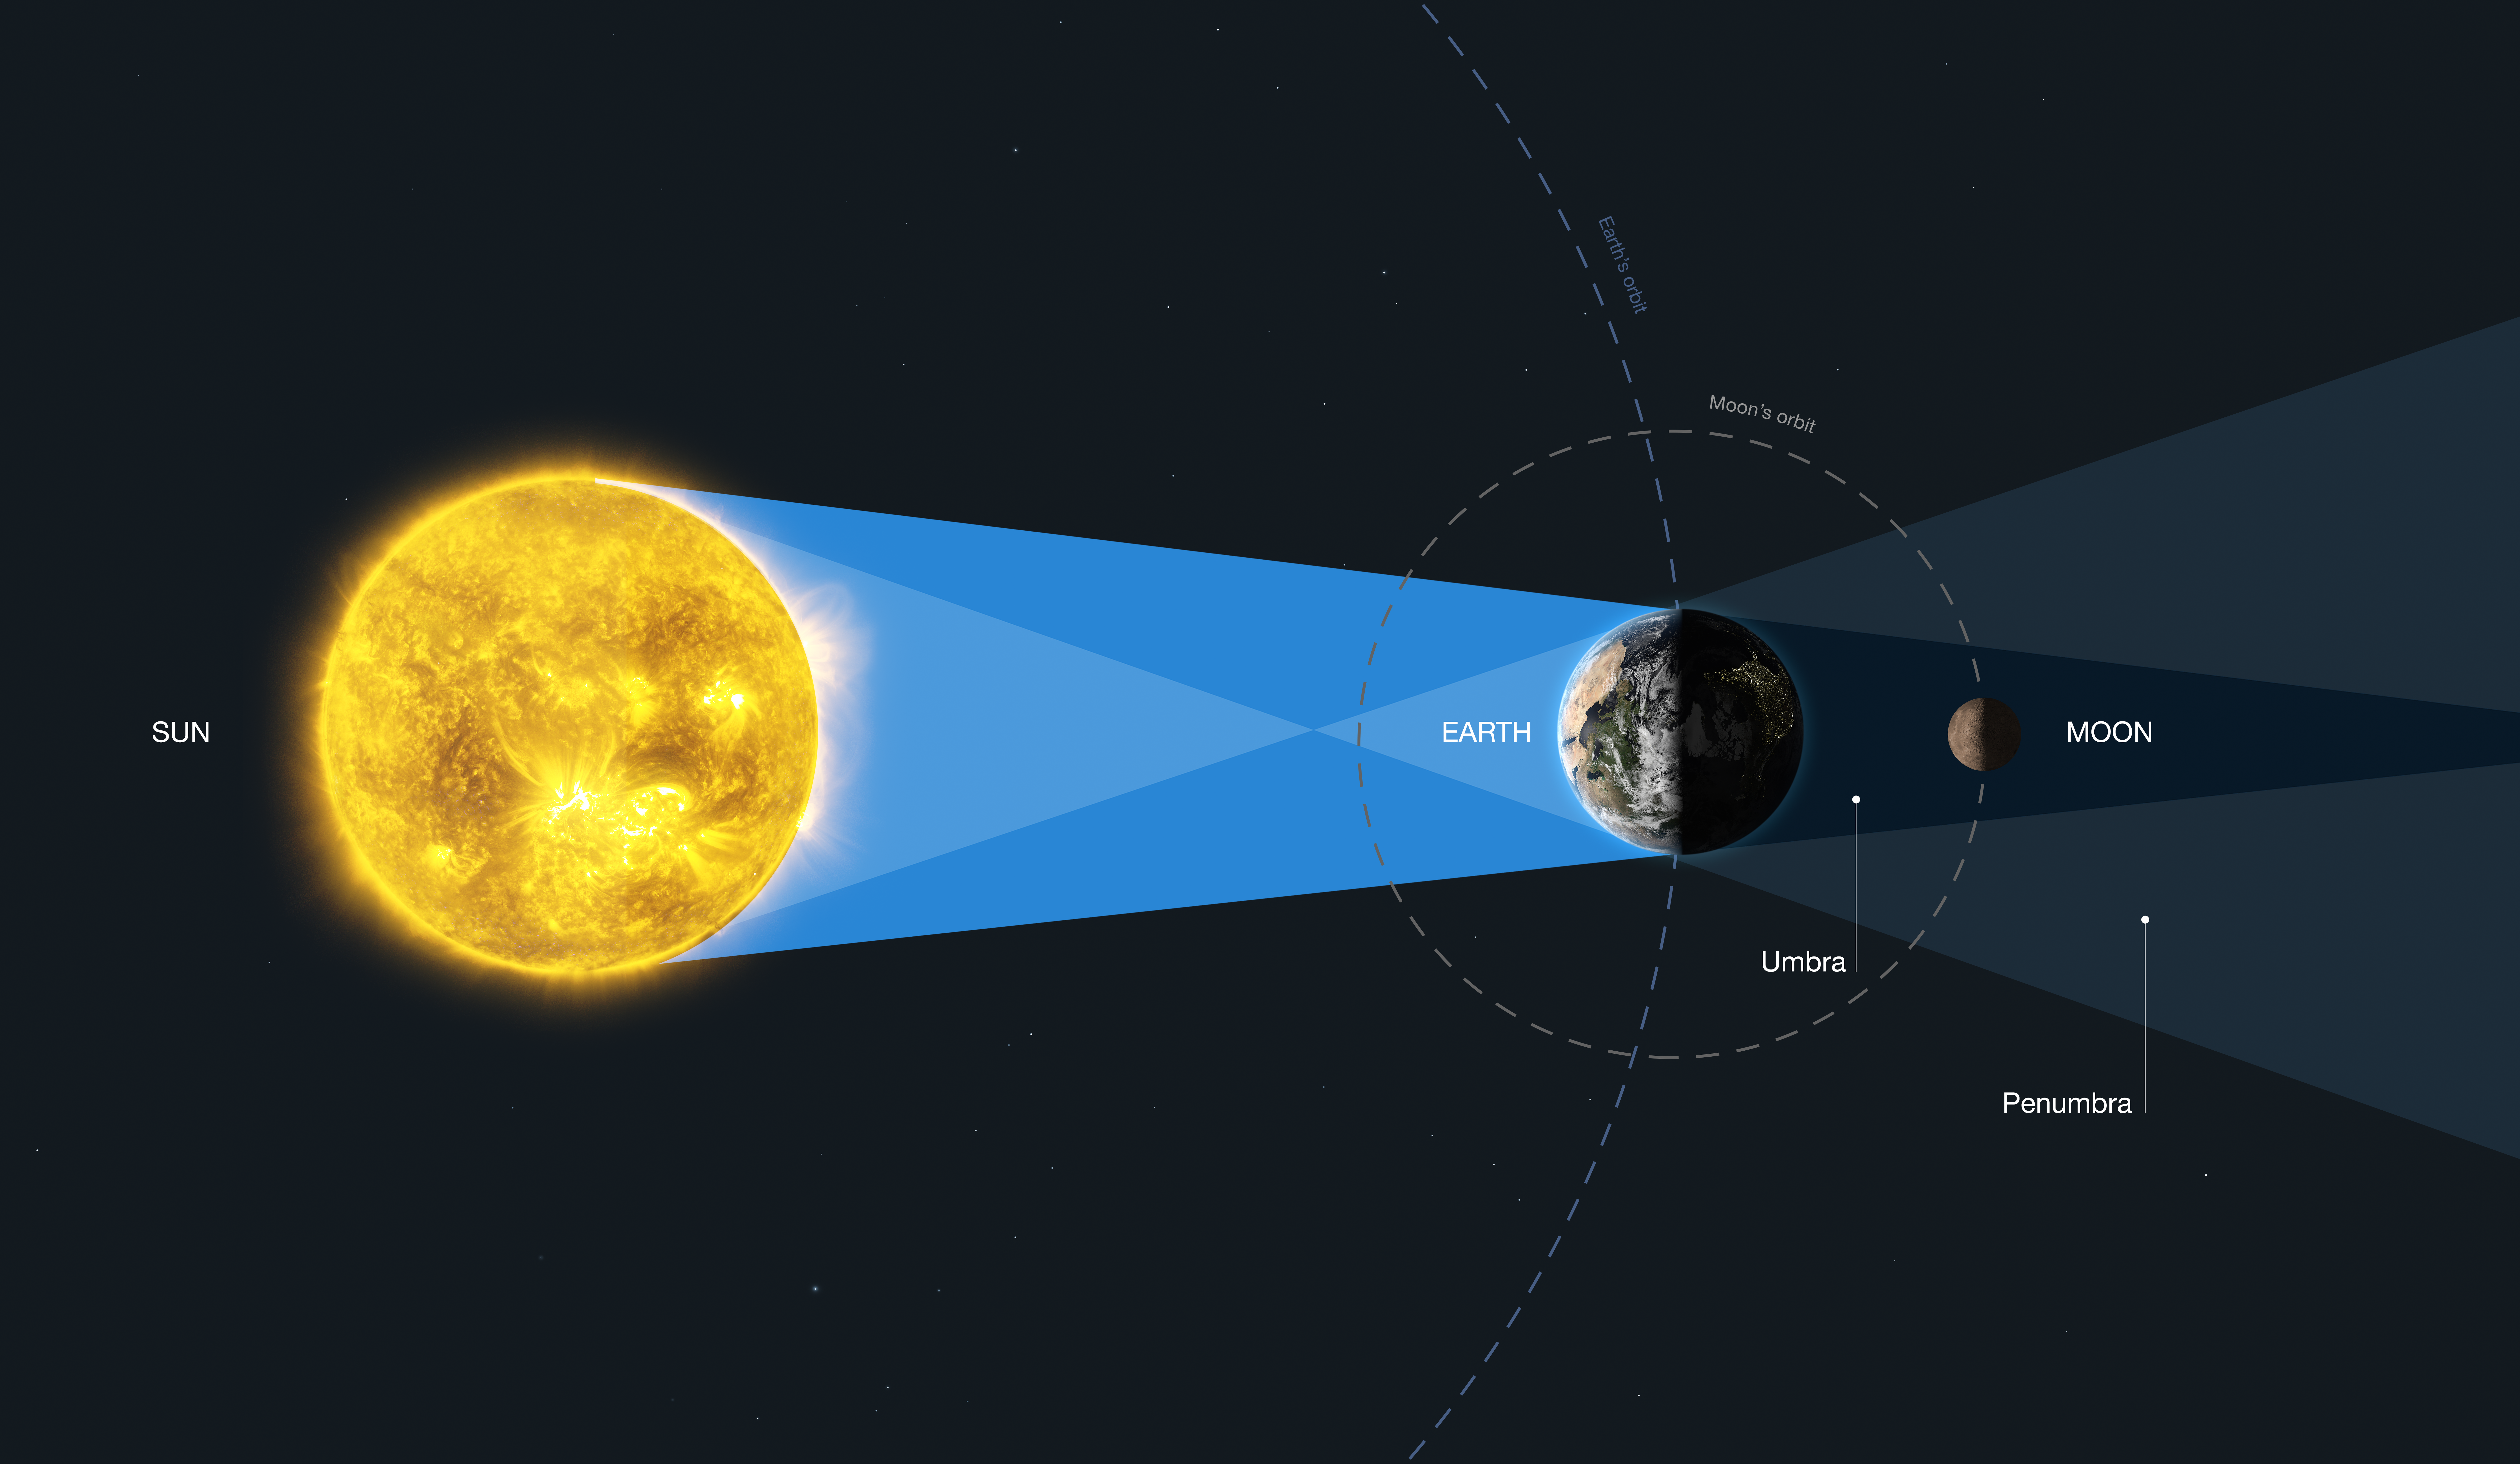

Lunar Eclipse

This diagram explains the geometry of the lunar eclipse.

When the moon is entirely in the Earth’s umbra (known as a total lunar eclipse or umbral eclipse), all sunlight reaching the lunar surface has been refracted or scattered through Earth’s atmosphere. When the moon is in the Earth’s penumbra (known as a penumbral eclipse), illumination comes from both direct sunlight and sunlight refracted and scattered through the planet's atmosphere. This is similar to an exoplanet transit observation.

Credit: ESA/Hubble, M. Kornmesser